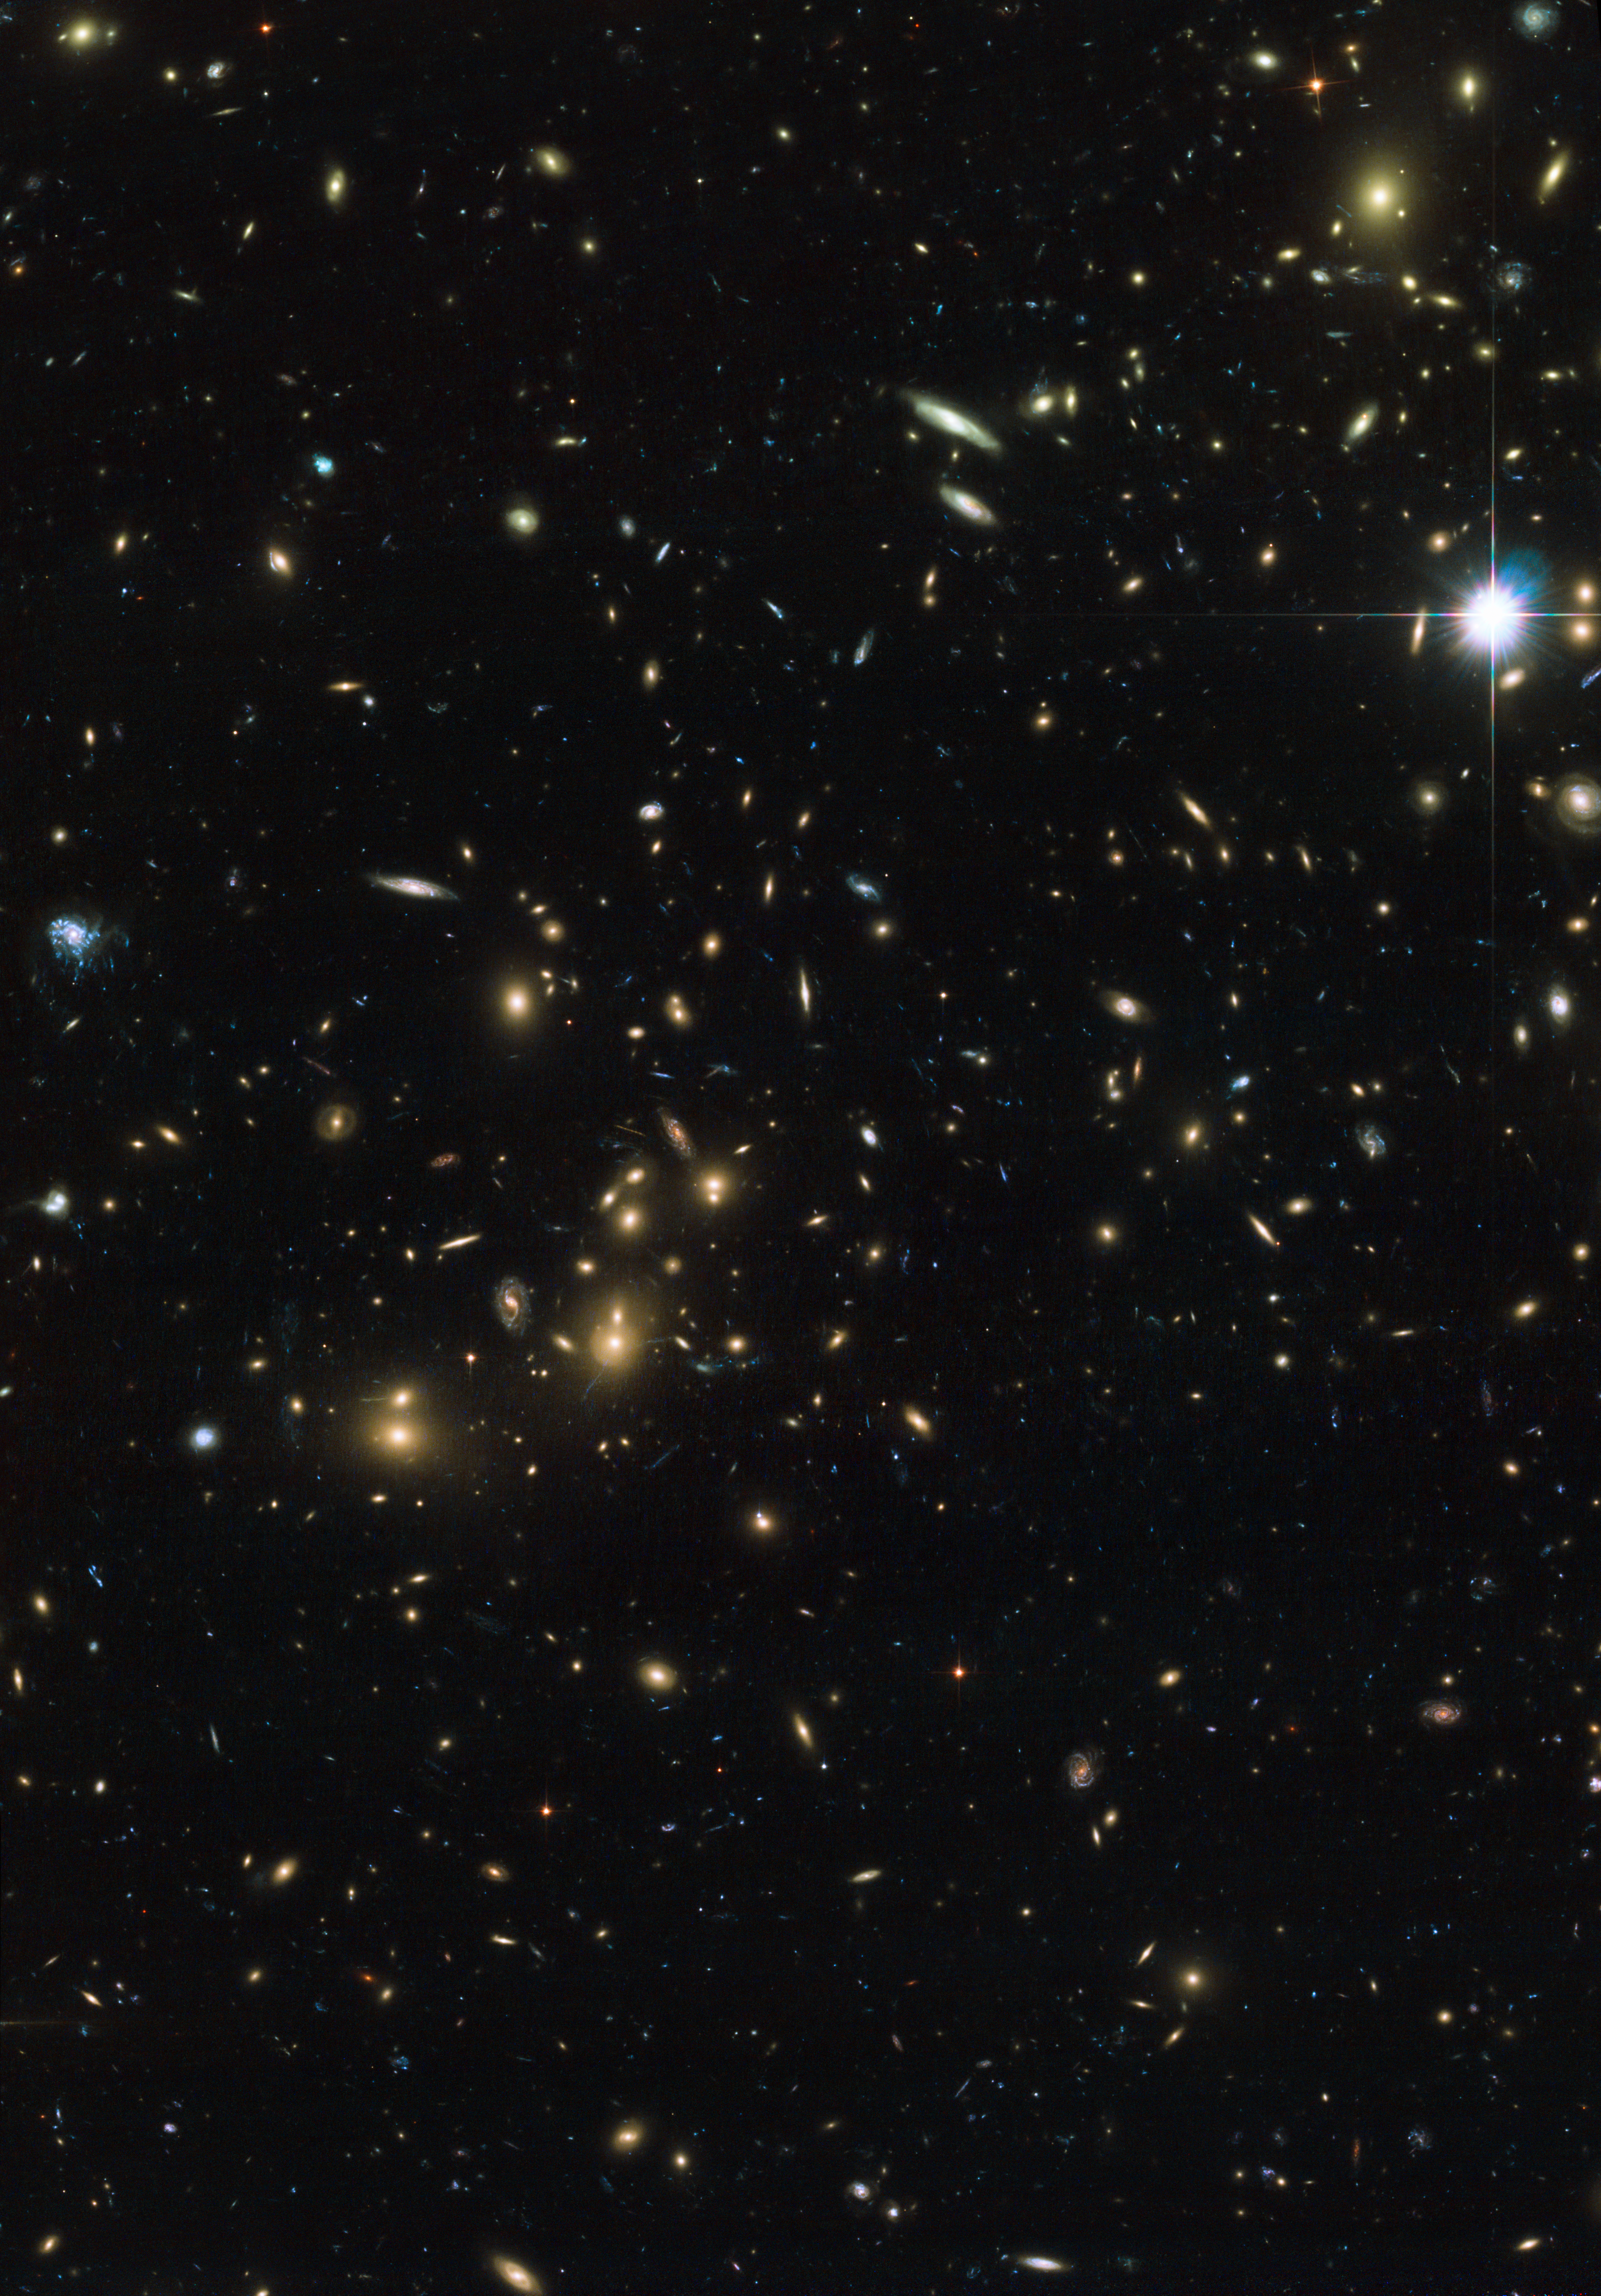

Hubble view of Abell 2744 — Pandora’s Cluster

This Hubble image, taken by the Advanced Camera for Surveys, shows the central part of merging galaxy cluster Abell 2744, nicknamed Pandora’s Cluster. This remarkable object seems to be the result of the collision of at least four separate galaxy clusters.

Credit: NASA, ESA and D. Coe (STScI)/J. Merten (Heidelberg/Bologna)